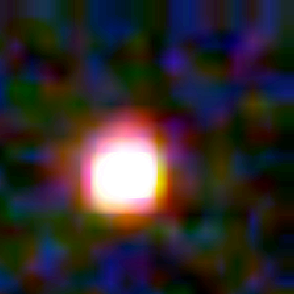

Galaxy building blocks

This is one Proto Galaxy out of a series of 18, taken by the Wide Field Planetary Camera 2.

Credit: Rogier Windhorst and Sam Pascarelle (Arizona State University) and NASA/ESA